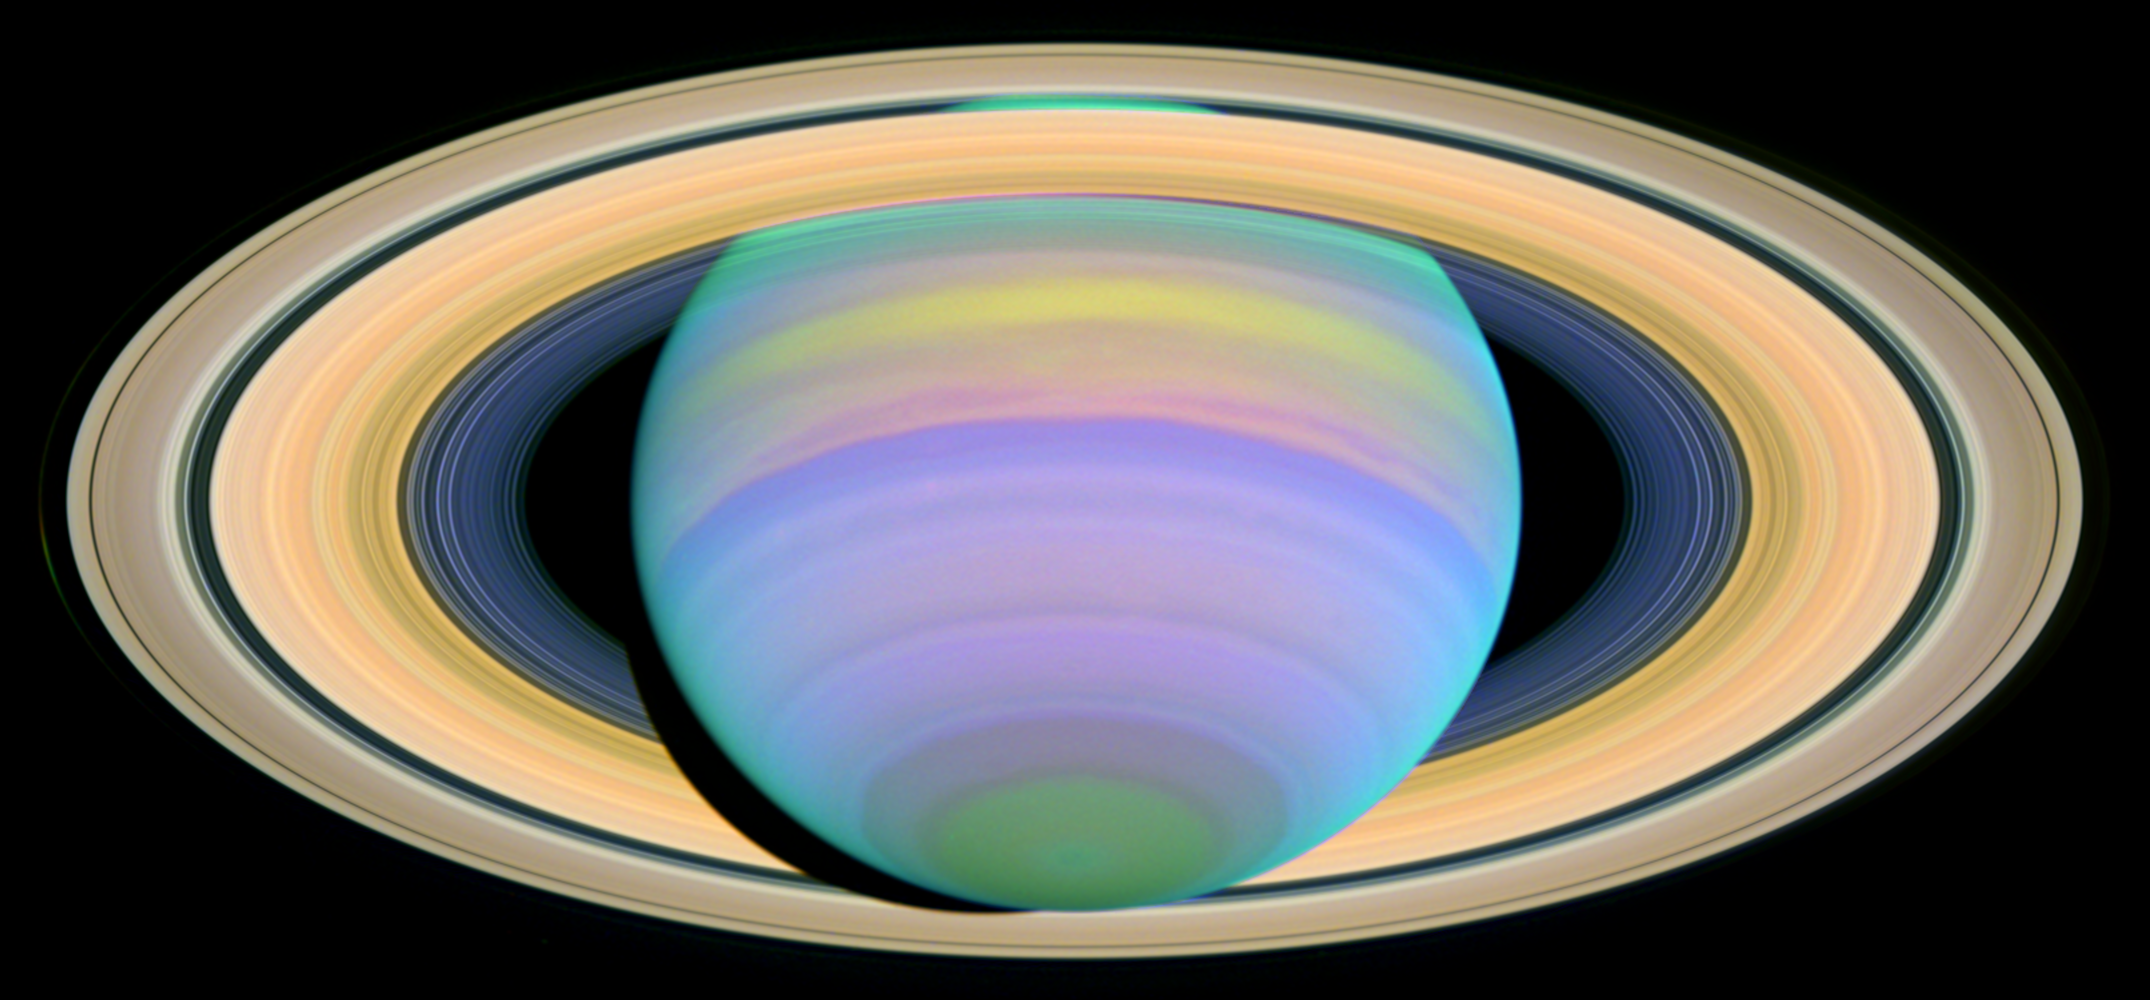

The Slant on Saturn's Rings (Ultraviolet)

This image from NASA's Hubble Space Telescope, seen in ultraviolet light, shows Saturn's Southern Hemisphere and the southern face of its rings.

Saturn experiences seasonal tilts away from and toward the Sun, much the same way Earth does, over the course of its 29.5-year orbit. This means that approximately every 30 years, we can catch Saturn with its rings at their maximum tilt of 27 degrees toward Earth and get the best glimpse of Saturn's South Pole and the southern side of the planet's rings.

Credit: NASA/ESA and E. Karkoschka (University of Arizona)